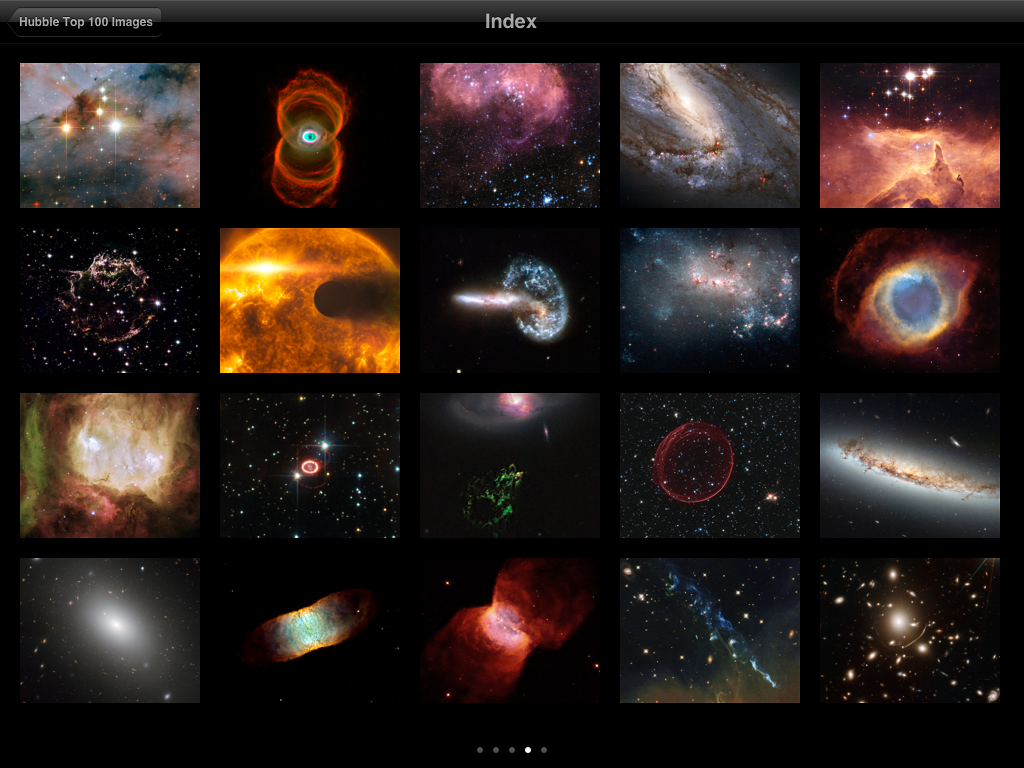

Screenshot from ESA/Hubble top 100 images v2.0 app

This is a screenshot showing a new index that has been added to the updated version of ESA/Hubble popular Top 100 Images app. The new version takes full advantage of the third generation iPad retina display and quad core graphics.

Credit: ESA/Hubble